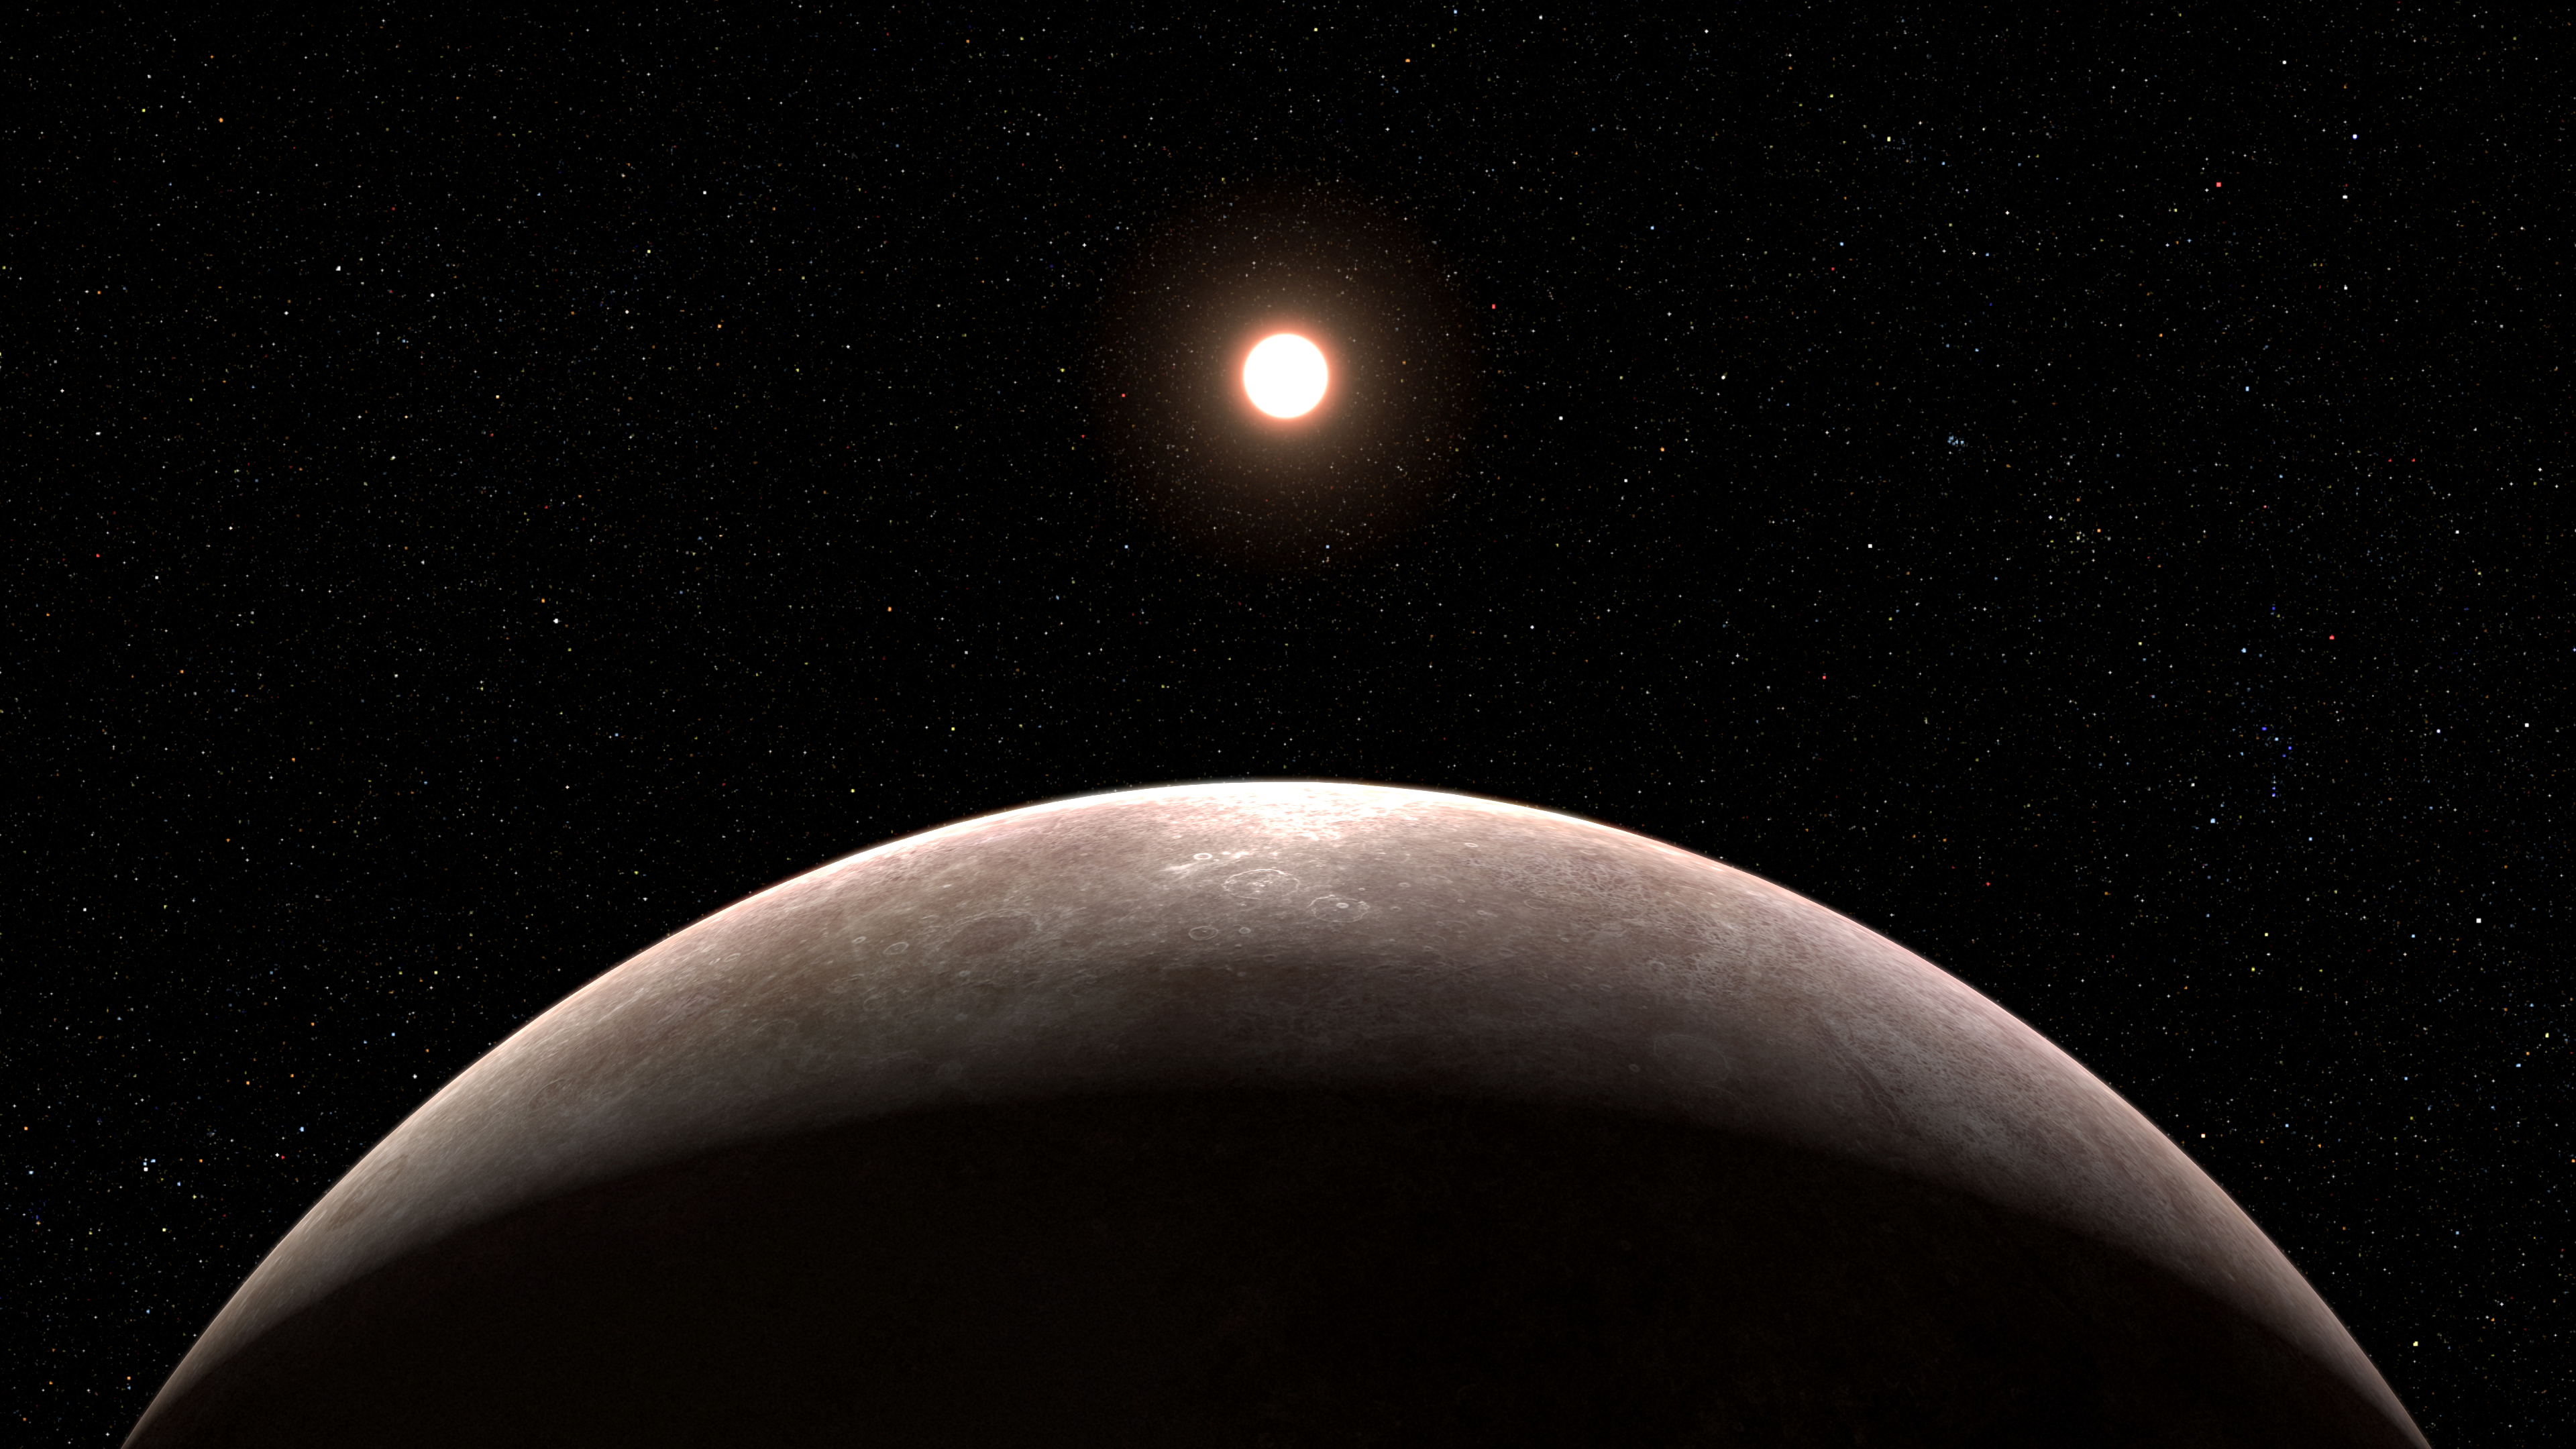

Exoplanet LHS 475 b and Its Star (Illustration)

Based on new evidence from the NASA/ESA/CSA James Webb Space Telescope, this illustration reflects the conclusion that the exoplanet LHS 475 b is rocky and almost precisely the same size as Earth. The planet whips around its star in just two days, far faster than any planet in the Solar System. Researchers will follow up this summer with additional observations with Webb, which they hope will allow them to definitively conclude if the planet has an atmosphere. LHS 475 b is relatively close, 41 light-years away, in the constellation Octans.

Credit: NASA, ESA, CSA, L. Hustak (STScI)